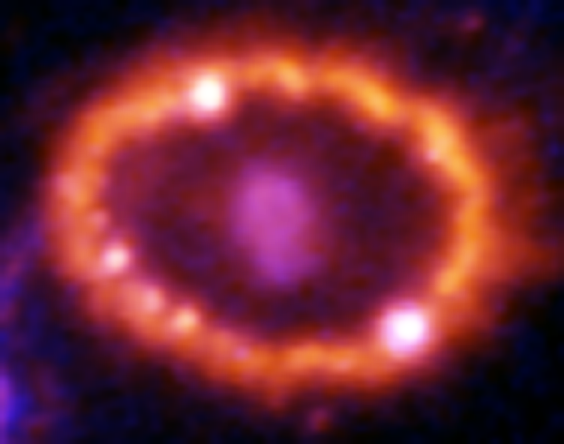

Hubble Supernova 1987A Scrapbook (1994-2003) - Image 11

in 1987, astronomers spotted the brightest stellar explosion ever seen since the one observed by Johannes Kepler over 400 years ago. Called SN 1987A, the titanic supernova explosion blazed with the power of 100,000,000 suns for several months following its discovery on Feb. 23 of that year. Although the supernova itself is over a million times fainter than when it was first discovered, a new light show in the space surrounding it is just beginning.

Credit: NASA/ESA, P. Challis, R. Kirshner (Harvard-Smithsonian Center for Astrophysics) and B. Sugerman (STScI)